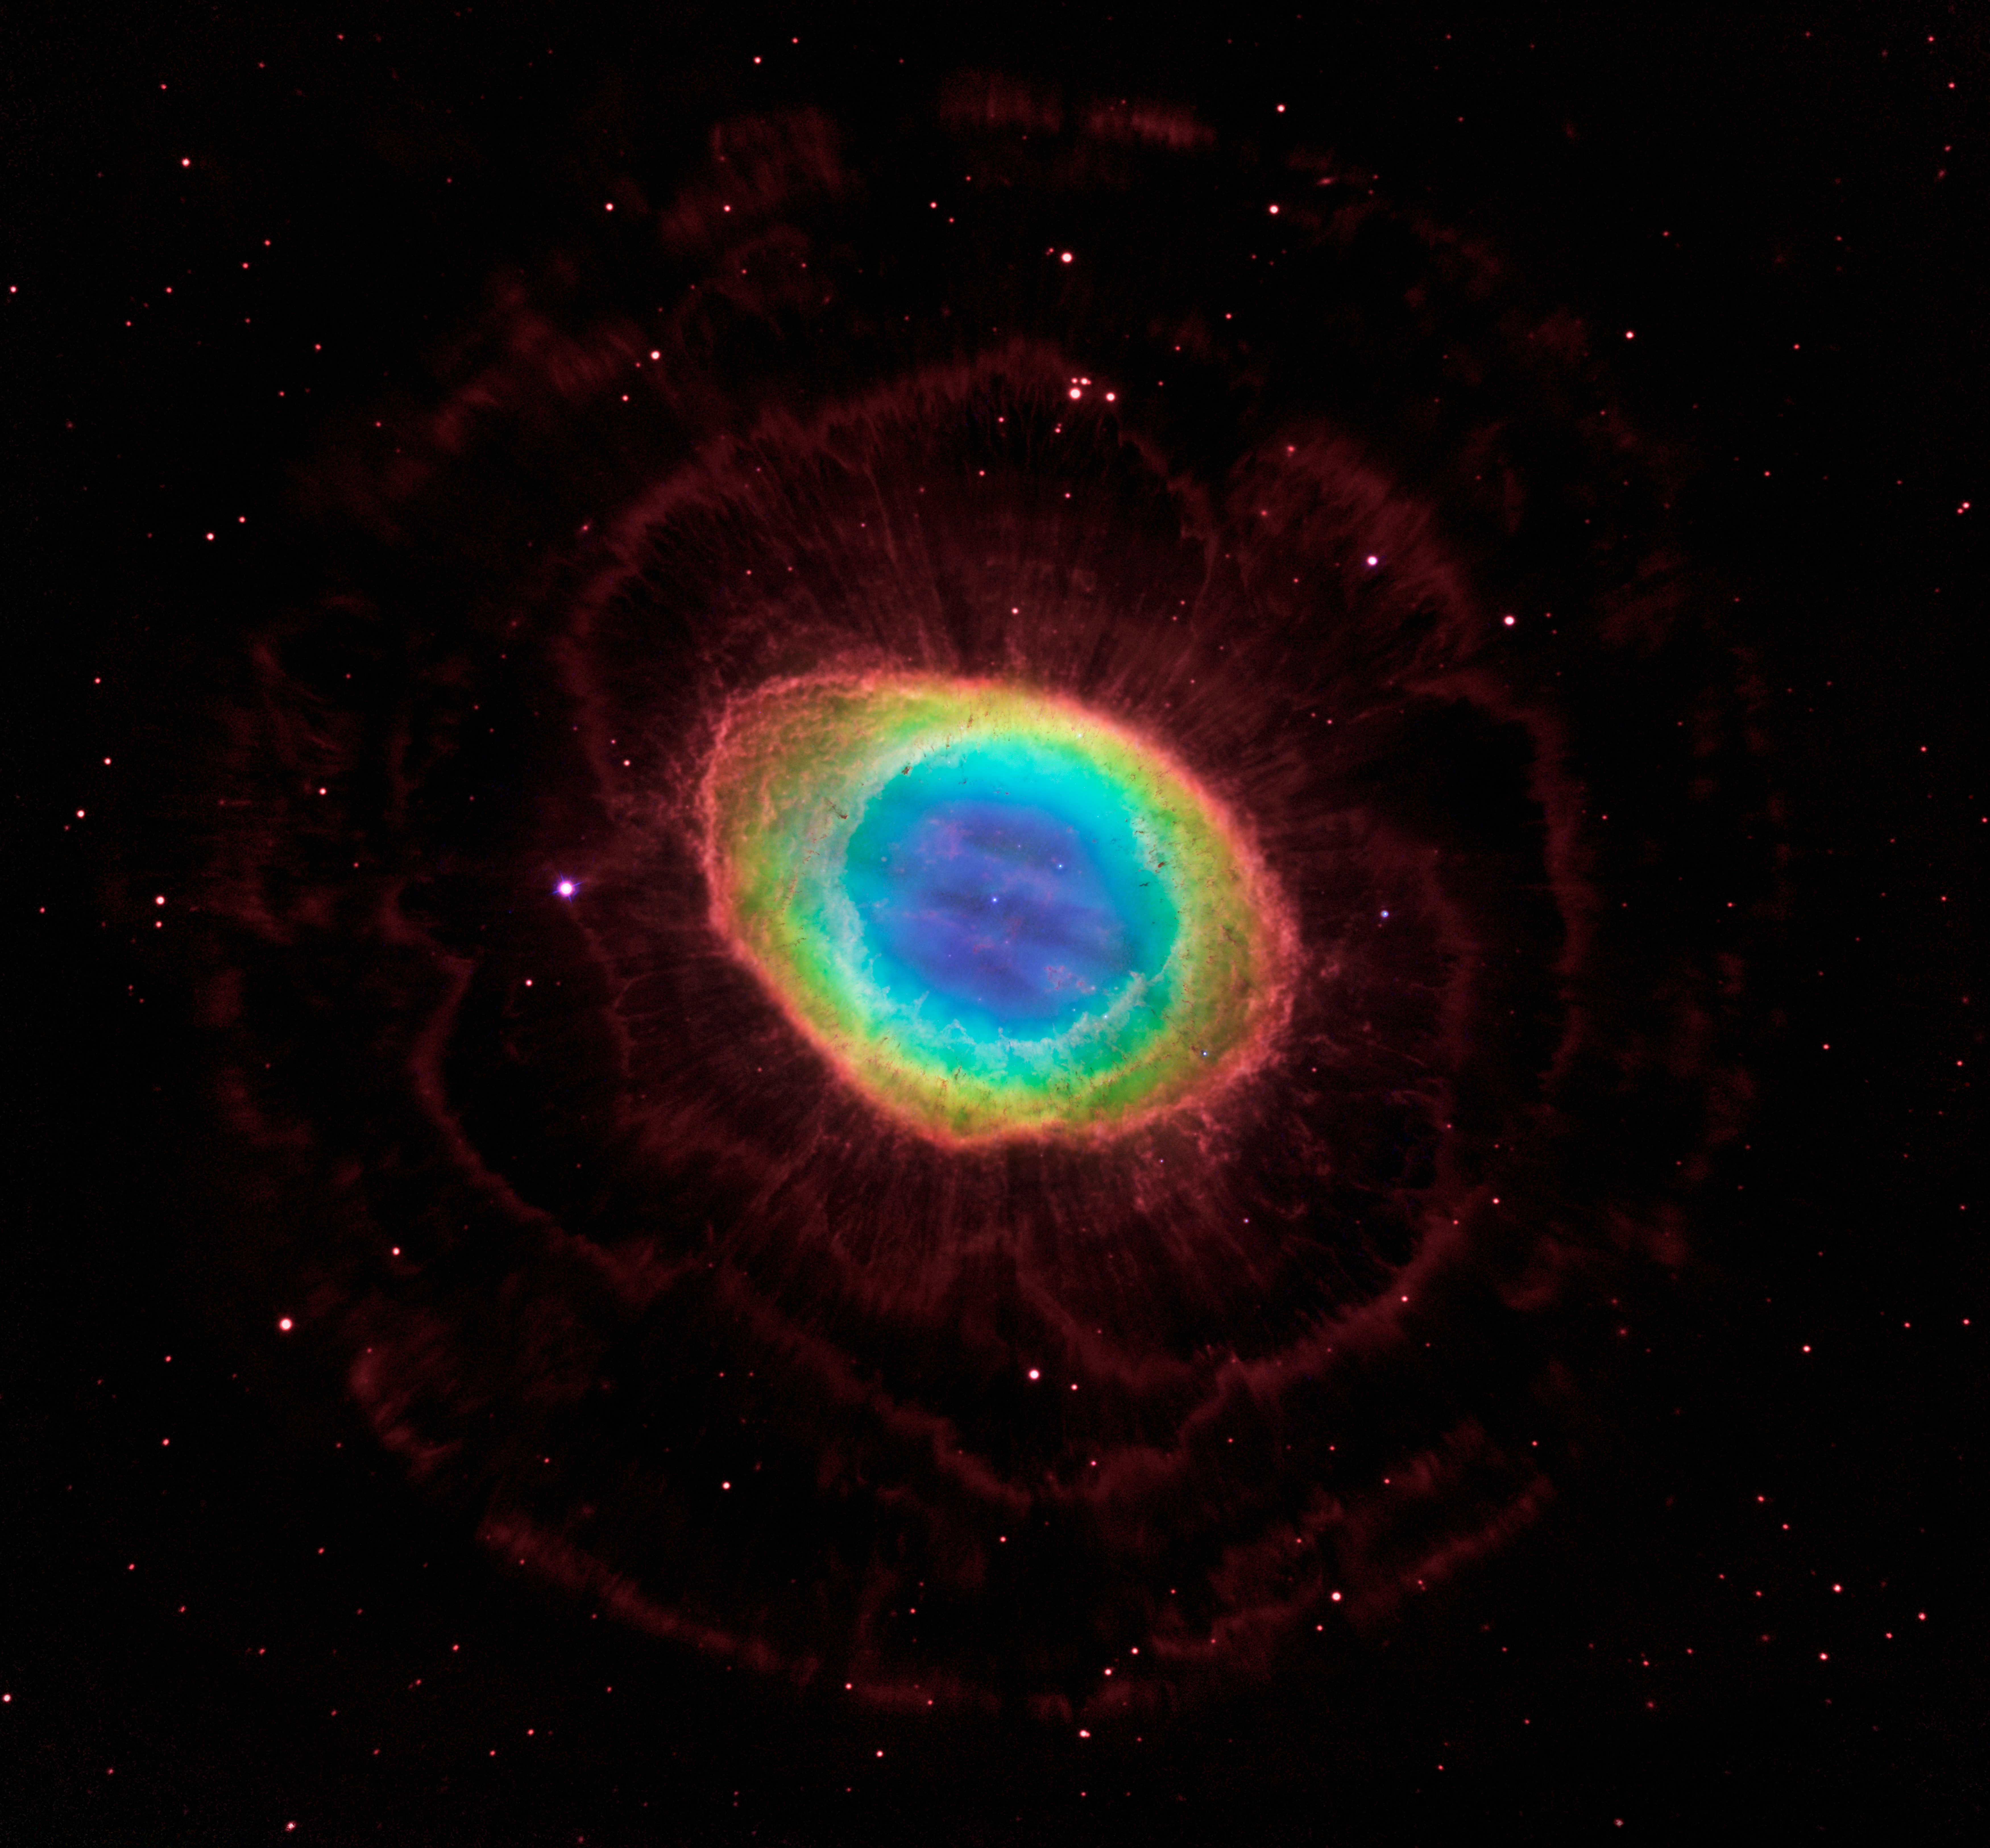

The region around the Ring Nebula (Hubble/LBT composite)

This image is a composite of the Ring Nebula (Messier 57). This combines new Hubble Wide Field Camera 3 data with observations of the nebula’s outer halo from the Large Binocular Telescope (LBT) in Arizona, USA. In this image, the knotty, turbulent space around the nebula shows up dramatically, creating an almost psychedelic effect.

The Large Binocular Telescope is part of the Mount Graham International Observatory in Arizona.

Credit for Hubble data: NASA, ESA, C. Robert O’Dell (Vanderbilt University), and David Thompson (LBTO)